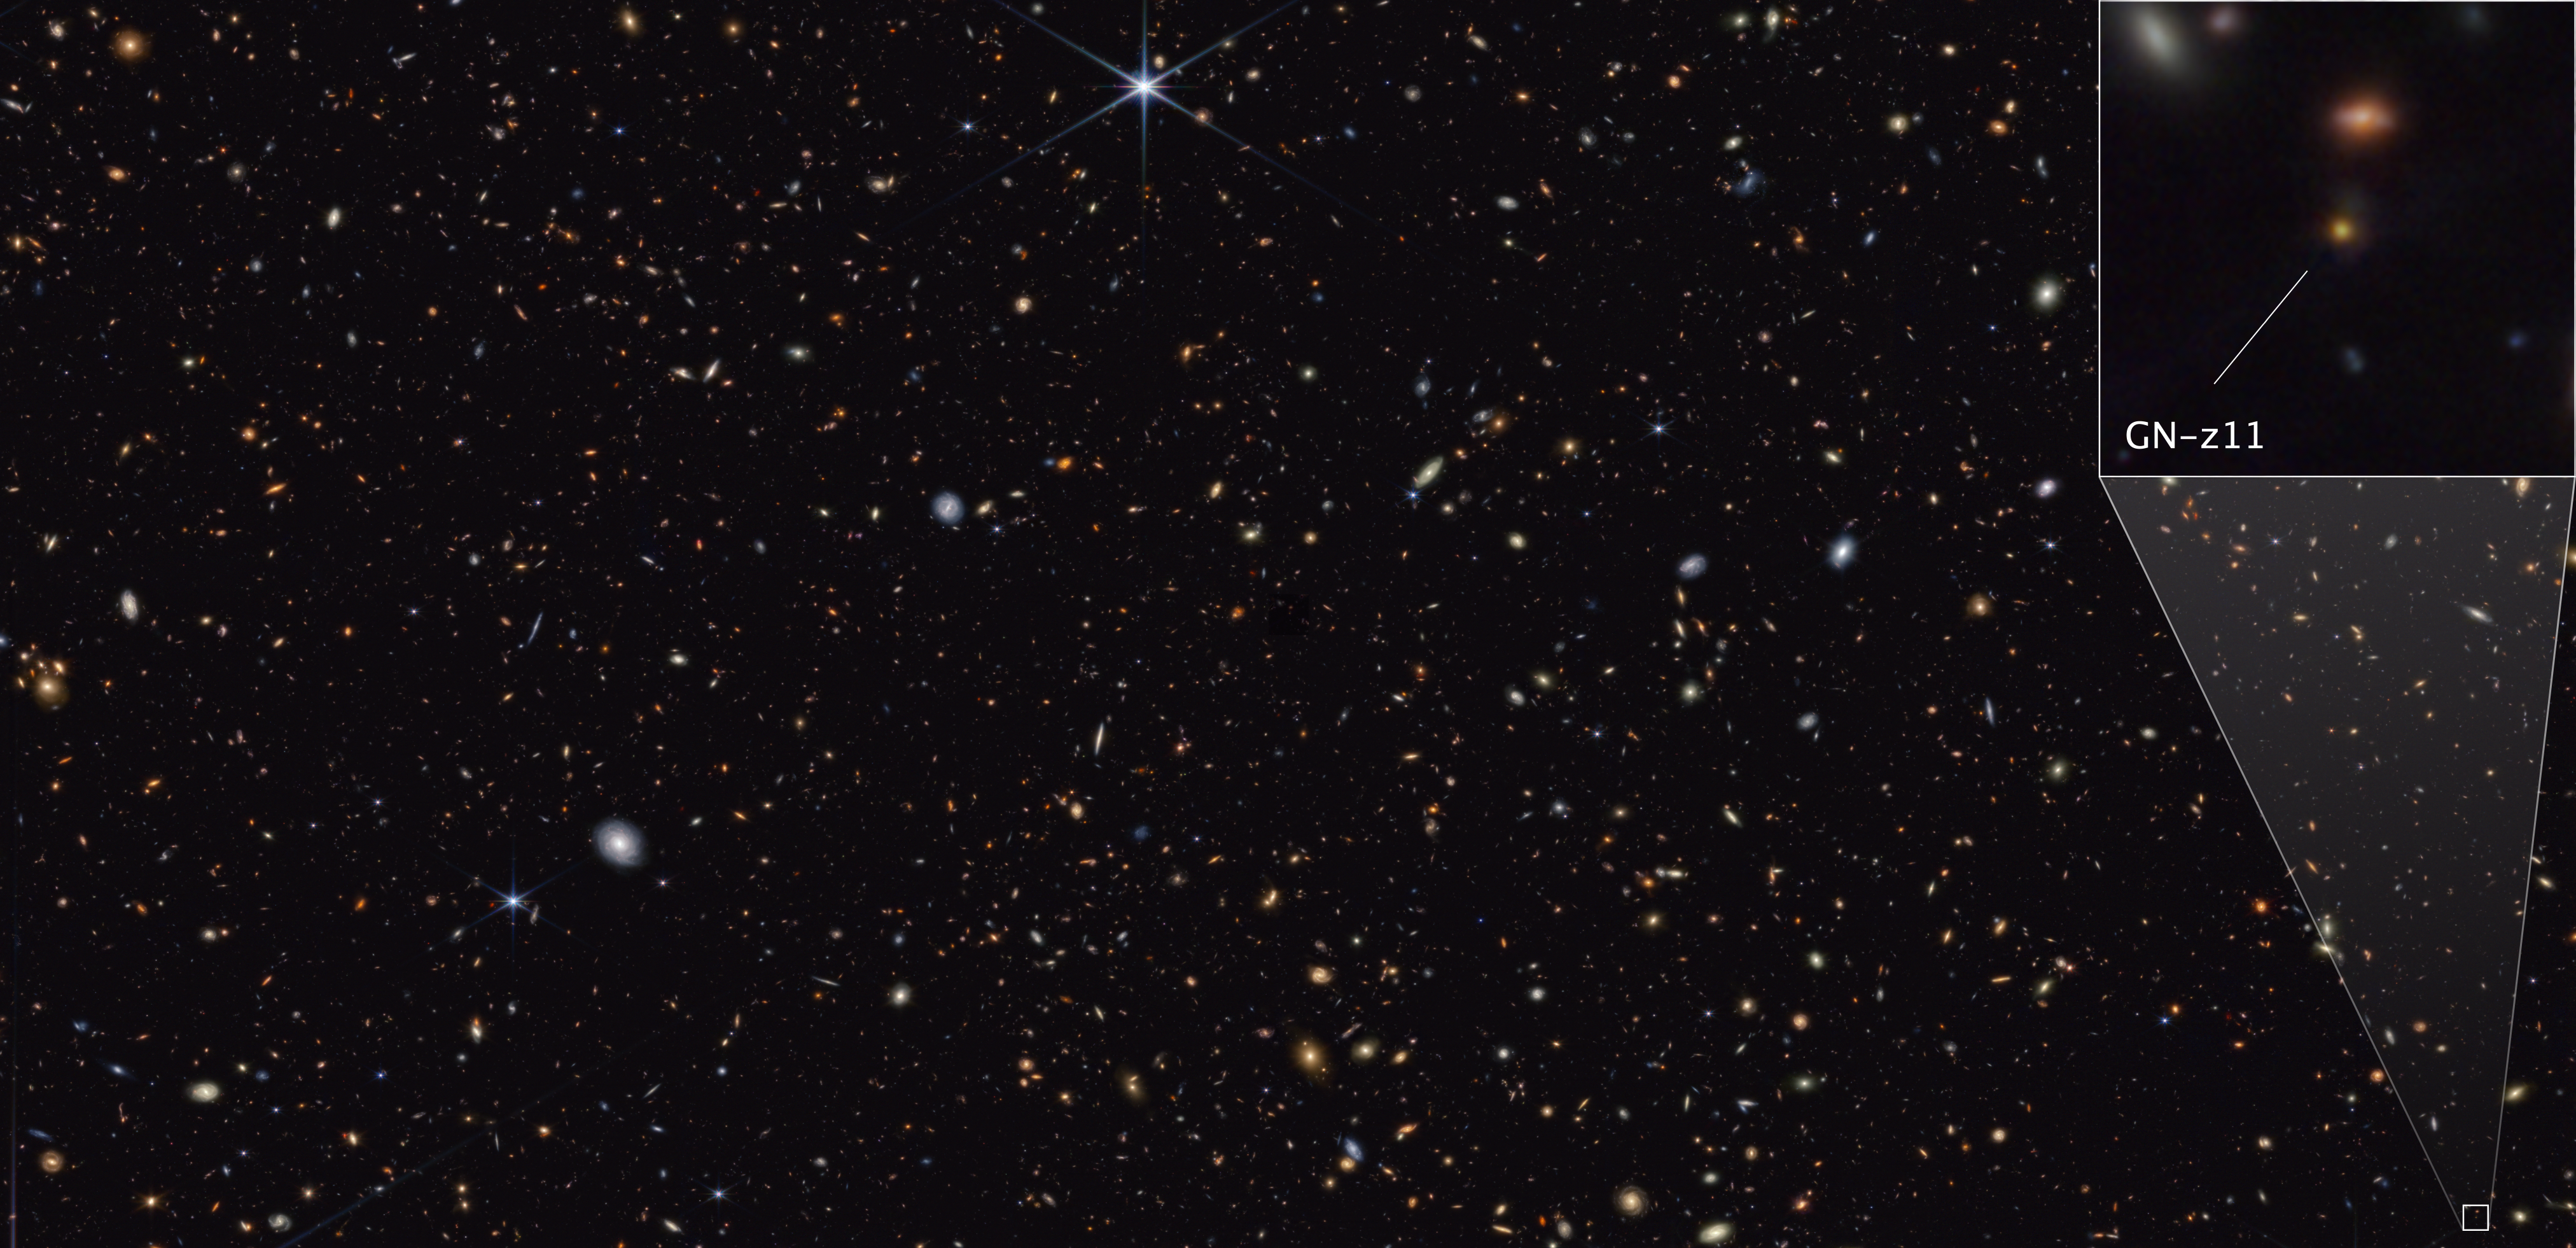

GN-z11 in the GOODS-North field

This image from Webb’s NIRCam (Near-Infrared Camera) instrument shows a portion of the GOODS-North field of galaxies. At the lower right, a pullout highlights the galaxy GN-z11, which is seen at a time just 430 million years after the Big Bang. The image reveals an extended component, tracing the GN-z11 host galaxy, and a central, compact source whose colours are consistent with those of an accretion disc surrounding a black hole.

Credit: NASA, ESA, CSA, B. Robertson (UC Santa Cruz), B. Johnson (CfA), S. Tacchella (Cambridge), M. Rieke (University of Arizona), D. Eisenstein (CfA)